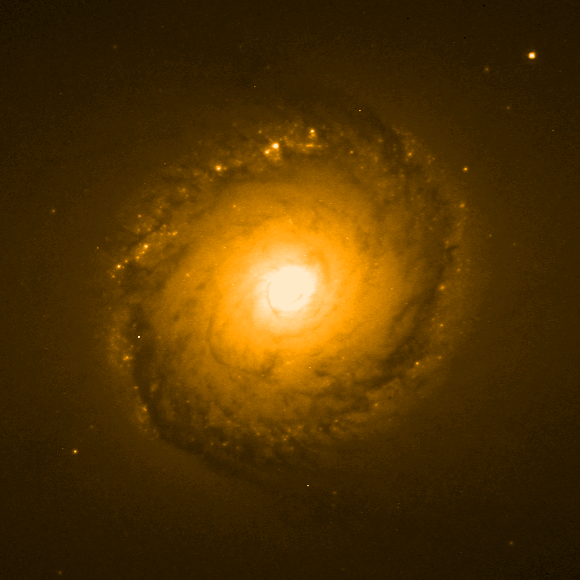

Individual colour images - 5 (WFPC2, 827 nm)

This is the fifth in a sequence of seven images which demonstrate the Hubble telescope's wavelength range, starting in the far ultraviolet and stretching all the way to the infrared.

This image was taken by the Wide Field and Planetary Camera 2(WFPC2). The orange colour (827 nm) depicts infrared light, which cannot be seen by the human eye. The image was taken on 5 March, 1999, and has an exposure time of 1100 s.

This image is issued jointly by NASA and ESA.

Credit: NASA, ESA, Dan Maoz (Tel-Aviv University, Israel, and Columbia University, USA)